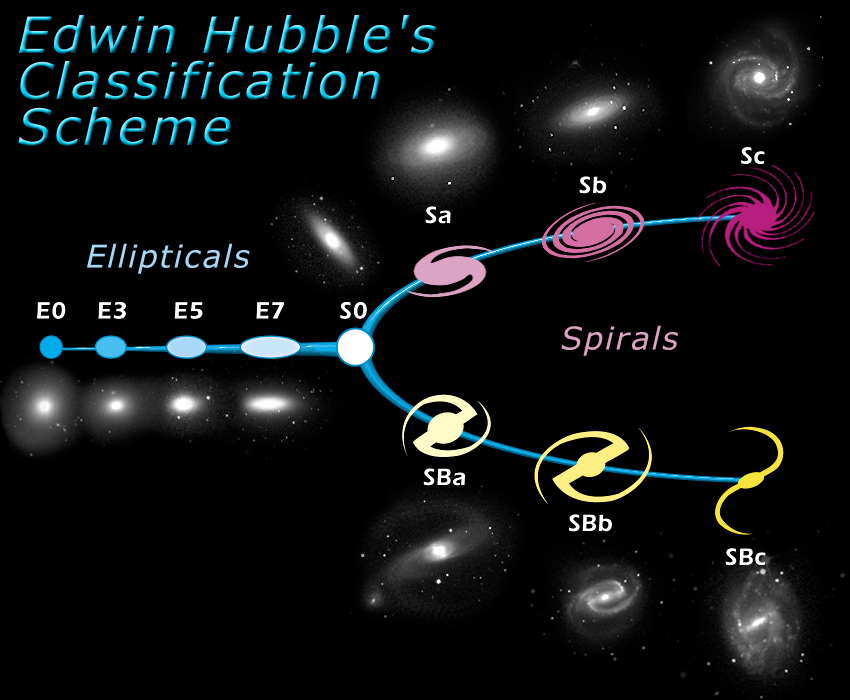

The Hubble tuning fork - classification of galaxies

Galaxies are very important fundamental building blocks of the Universe. Some are simple, while others are very complex in structure. As one of the first steps towards a coherent theory of galaxy evolution, the American astronomer Edwin Hubble, developed a classification scheme of galaxies in 1926. Although this scheme, also known as the Hubble tuning fork diagram, is now considered somewhat too simple, the basic ideas still hold.

The diagram is roughly divided into two parts: elliptical galaxies (ellipticals) and spiral galaxies (spirals). Hubble gave the ellipticals numbers from zero to seven, which characterize the ellipticity of the galaxy - "E0" is almost round, "E7" is very elliptical.

The spirals were assigned letters from "a" to "c," which characterize the compactness of their spiral arms. "Sa" spirals, for example, are tightly wound whereas "Sc" spirals are more loosely wound. Also it is worth noting that the sizes of the round central regions in spirals - the so-called bulges - increase in size the more tightly the spiral arms are wound. There are indications pointing to a very close connection between the bulges of certain galaxies (Hubble types "S0", "Sa" and "Sb") and elliptical galaxies. They may very well be similar objects.

In fact the spiral galaxies are sub-divided into two groups - normal spirals and barred spirals. The most important difference between these two groups is the bar of stars that runs through the central bulge in barred spirals. The spiral arms in barred spirals usually start at the end of the bar instead of from the bulge. Barred spirals have a "B" in their classification. An "SBc" is thus a loosely wound barred spiral galaxy.

"S0," or lenticular galaxies, are in the transition zones between ellipticals and spirals and bridge these two types.

Hubble found that some galaxies are difficult to put in the context of the tuning fork diagram. Those include irregular galaxies which have odd shapes, dwarf galaxies which are very small, and giant elliptical galaxies which are very large elliptical galaxies residing in the centers of some clusters of galaxies.

Credit: NASA & ESA